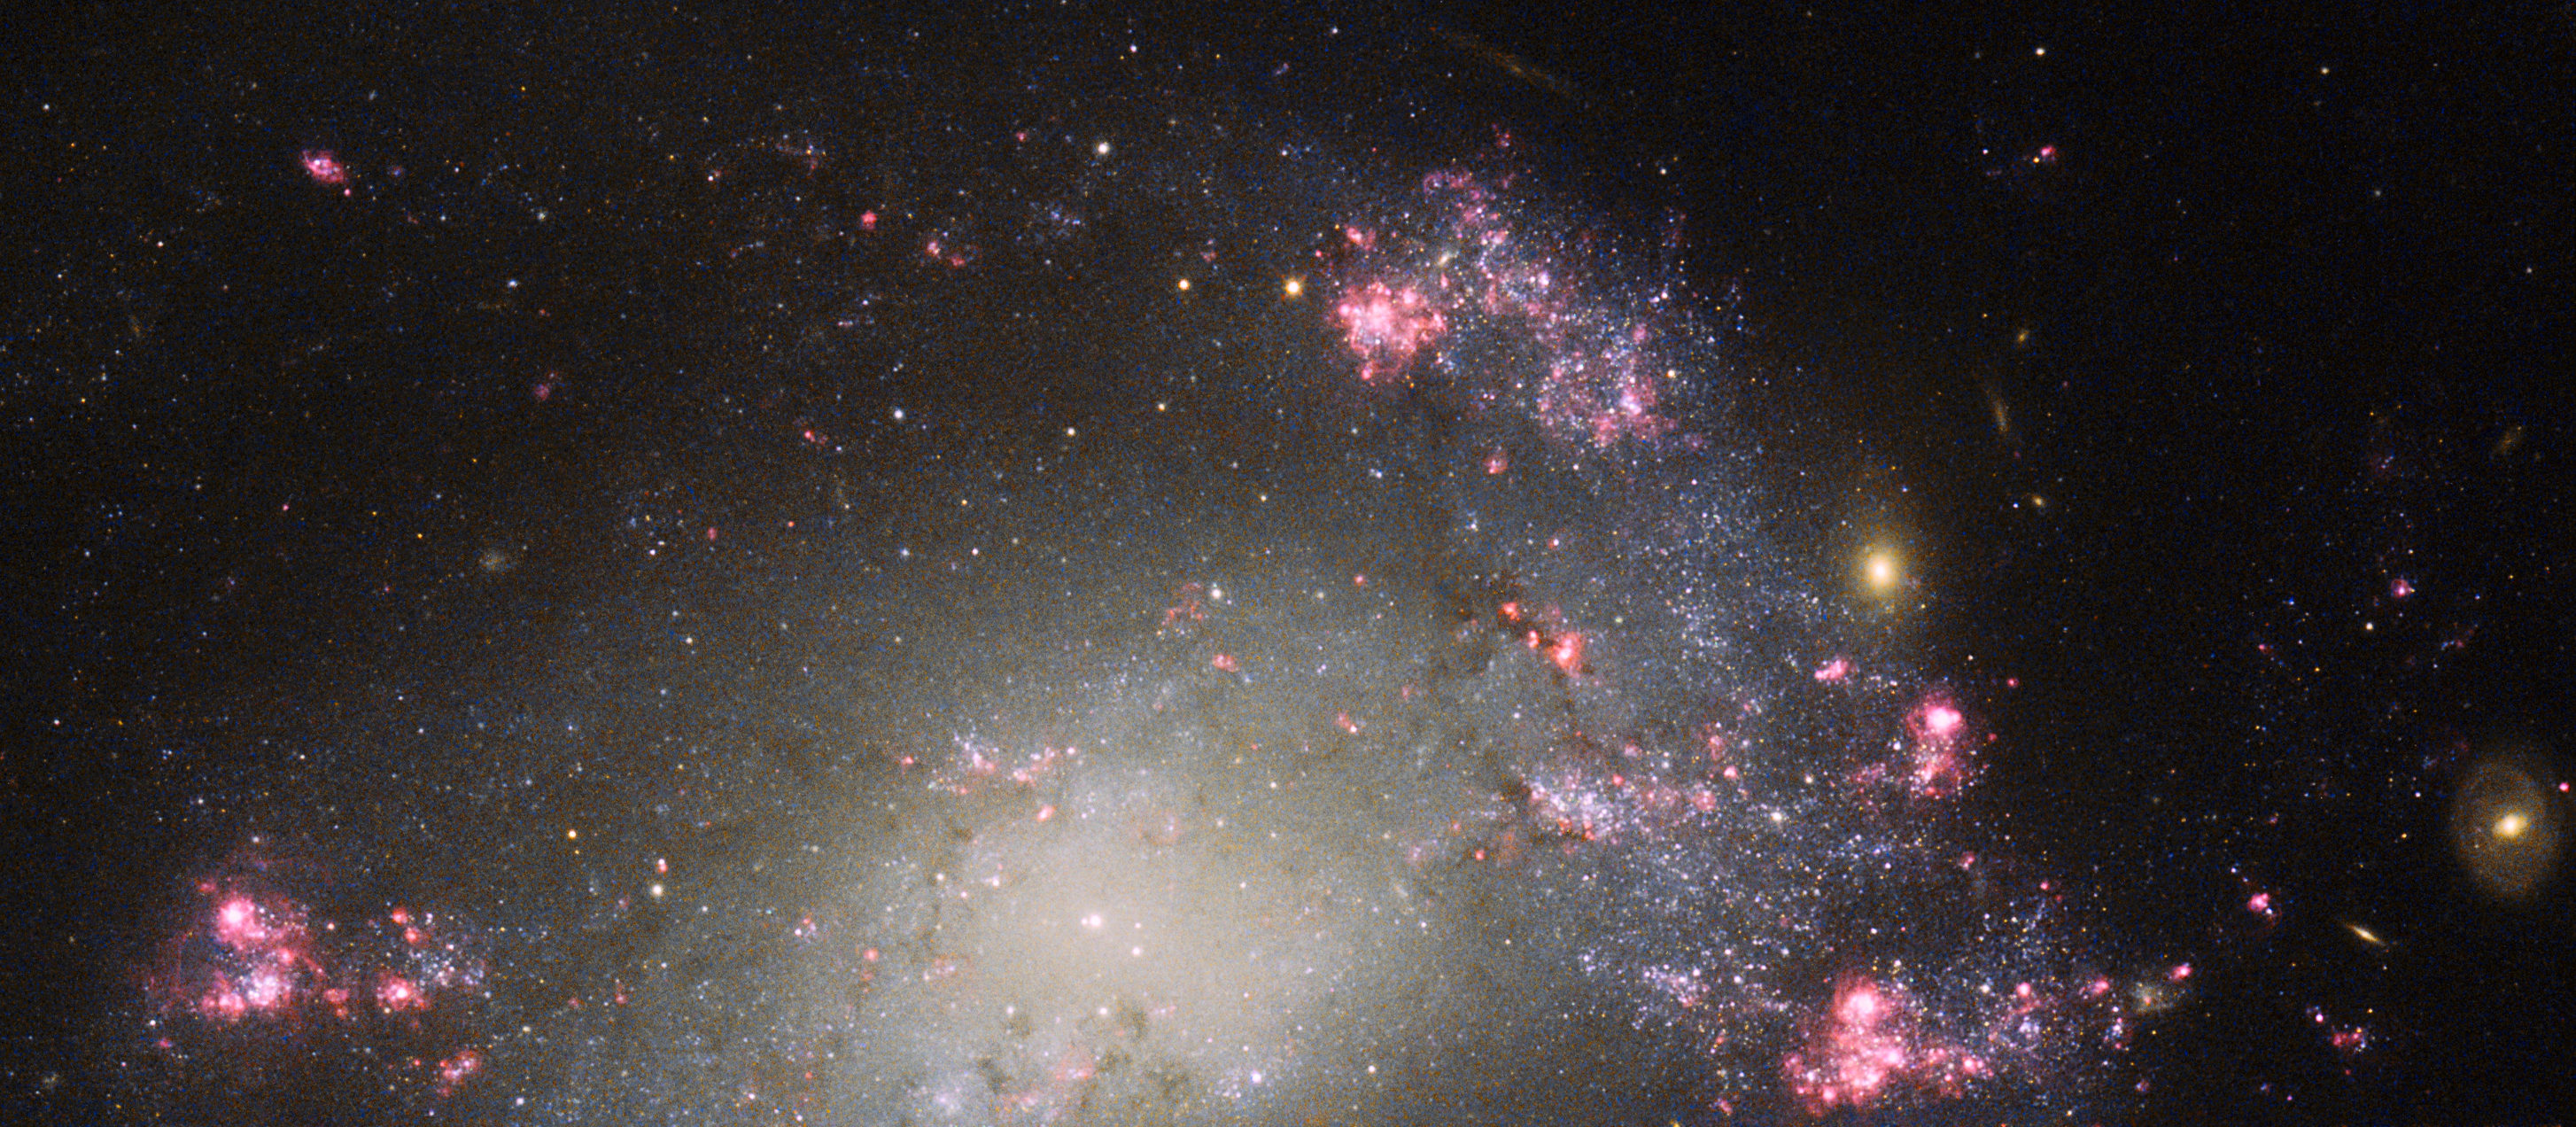

A mess of stars

Bursts of pink and red, dark lanes of mottled cosmic dust, and a bright scattering of stars — this NASA/ESA Hubble Space Telescope image shows part of a messy barred spiral galaxy known as NGC 428. It lies approximately 48 million light-years away from Earth in the constellation of Cetus (The Sea Monster).

Although a spiral shape is still just about visible in this close-up shot, overall NGC 428’s spiral structure appears to be quite distorted and warped, thought to be a result of a collision between two galaxies. There also appears to be a substantial amount of star formation occurring within NGC 428 — another telltale sign of a merger. When galaxies collide their clouds of gas can merge, creating intense shocks and hot pockets of gas and often triggering new waves of star formation.

NGC 428 was discovered by William Herschel in December 1786. More recently a type Ia supernova designated SN2013ct was discovered within the galaxy by Stuart Parker of the BOSS (Backyard Observatory Supernova Search) project in Australia and New Zealand, although it is unfortunately not visible in this image.

This image was captured by Hubble’s Advanced Camera for Surveys (ACS) and Wide Field and Planetary Camera 2 (WFPC2). A version of this image was entered into the Hubble’s Hidden Treasures Image Processing competition by contestants Nick Rose and the Flickr user penninecloud.

Credit: ESA/Hubble and NASA and S. Smartt (Queen's University Belfast) Acknowledgements: Nick Rose and Flickr user penninecloud